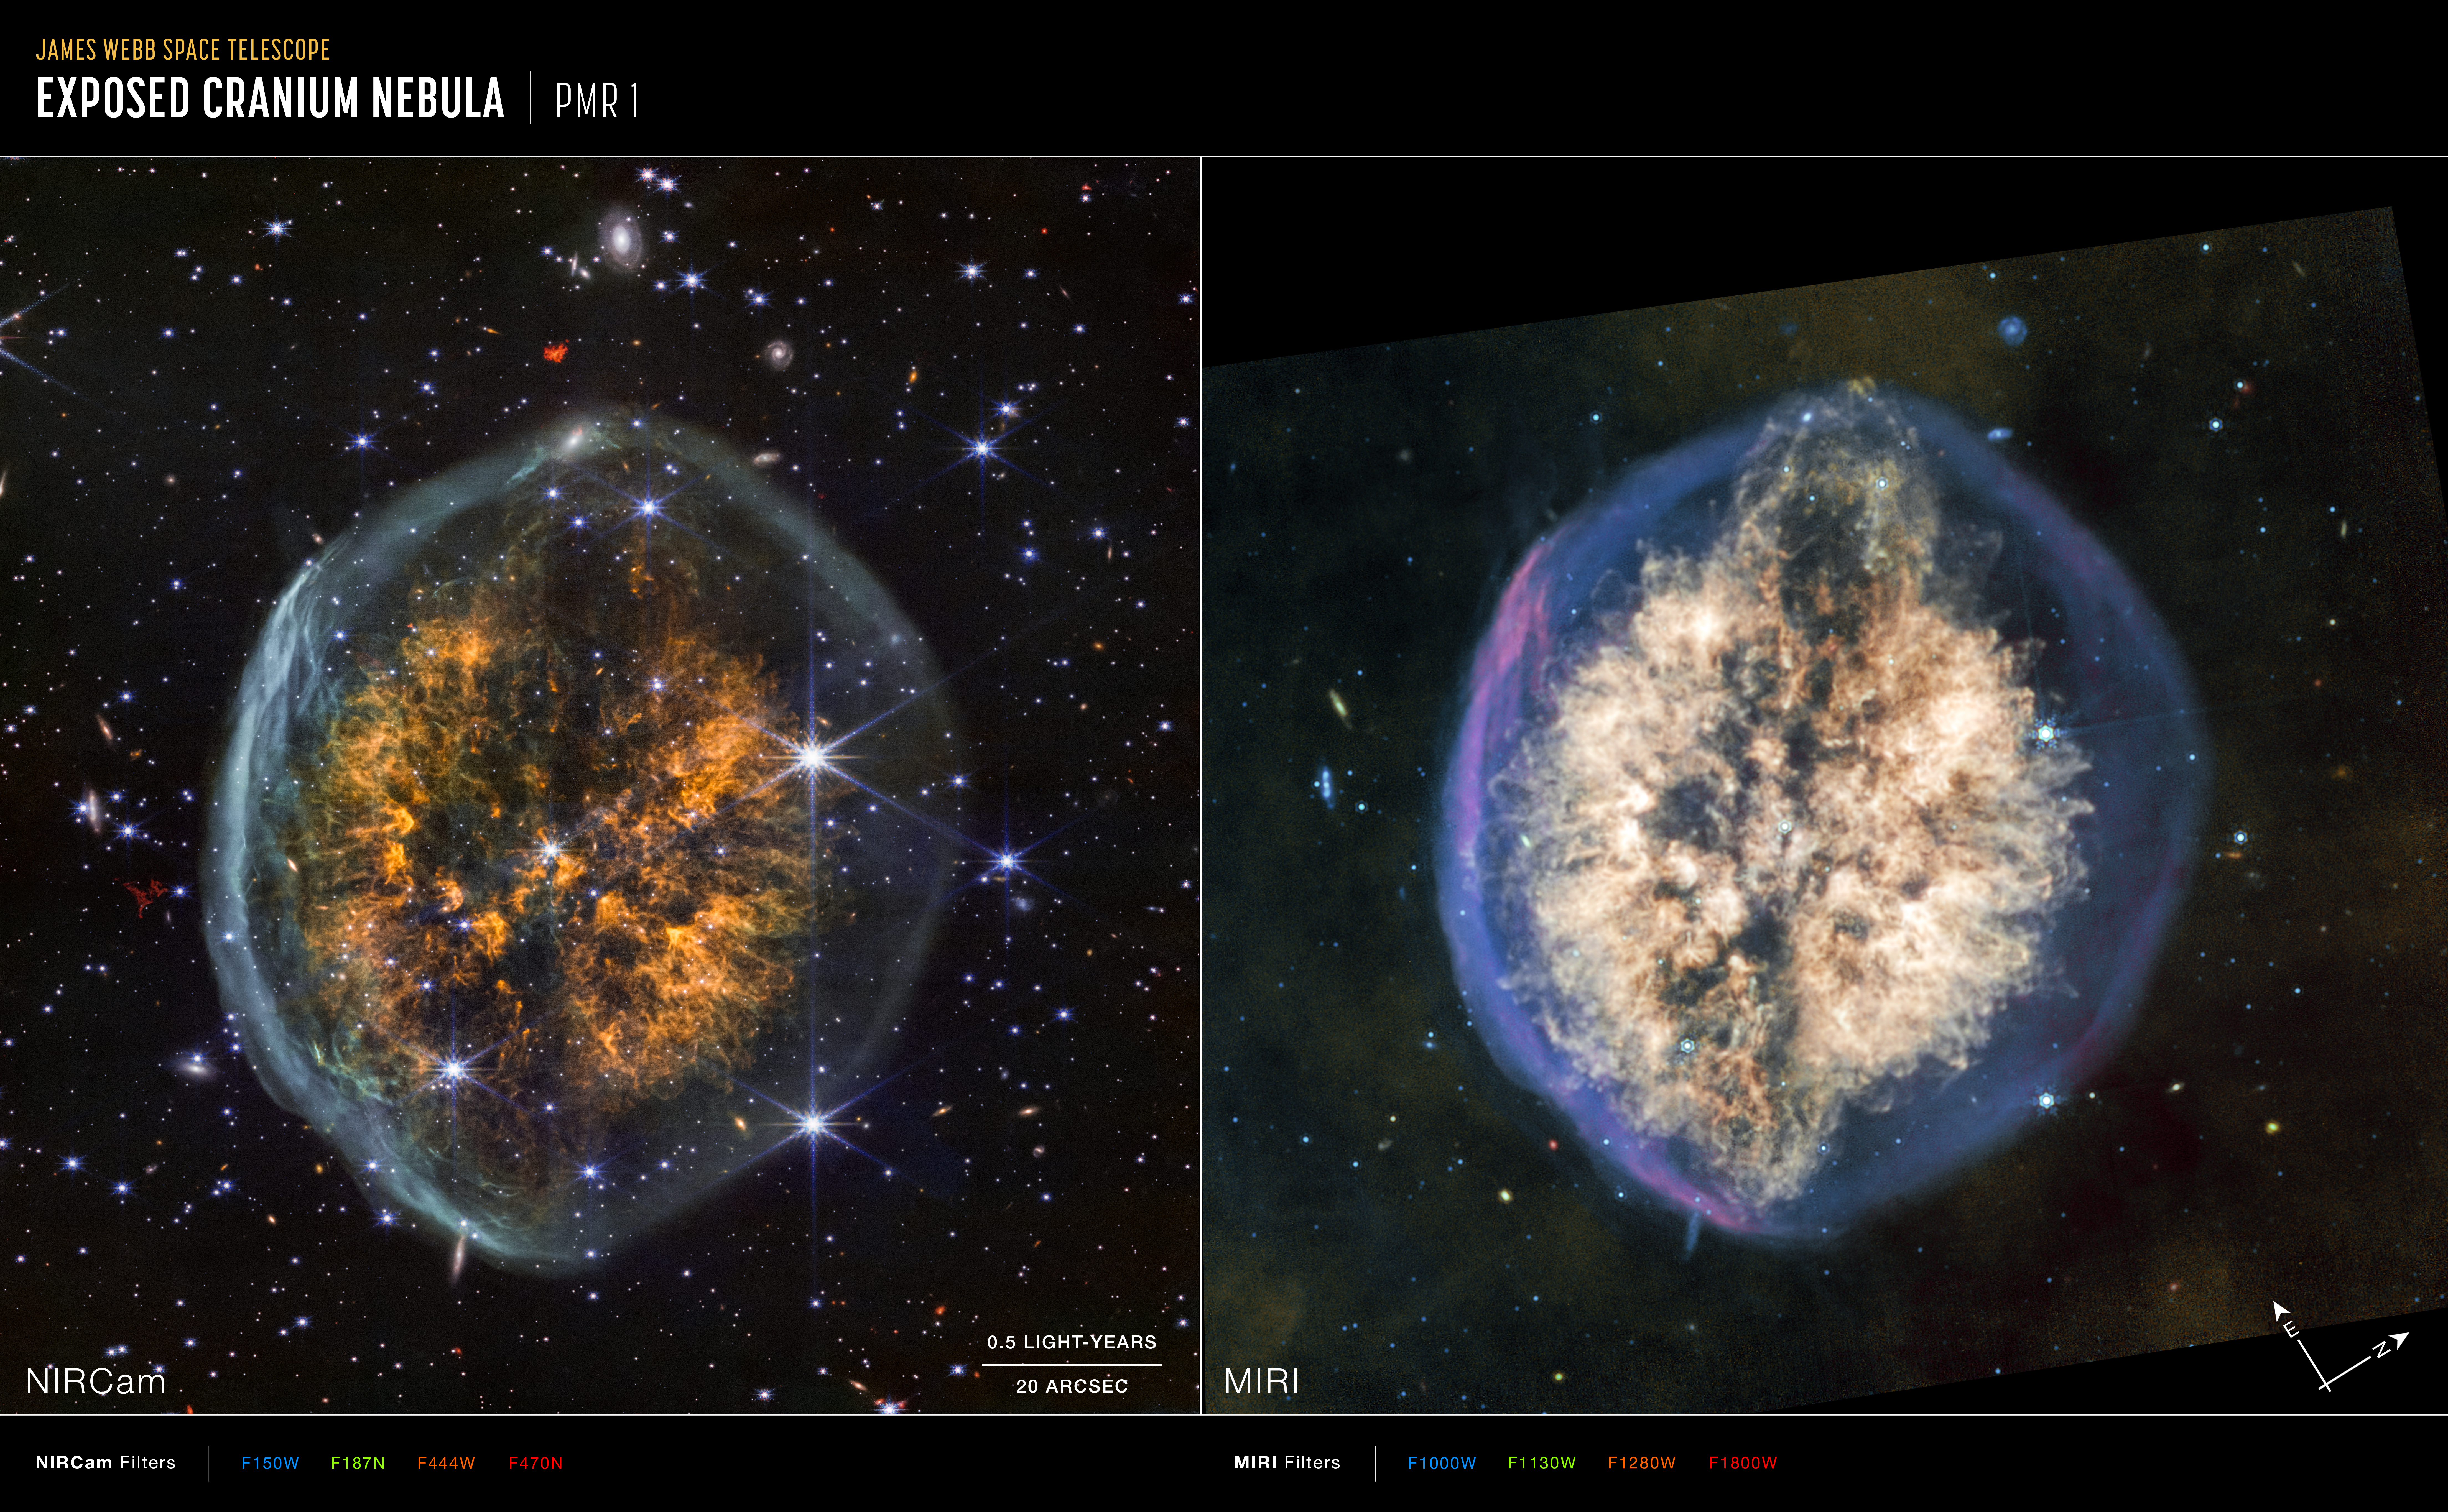

Exposed Cranium Nebula (NIRCam and MIRI annotated images)

These images of the “Exposed Cranium” nebula PMR 1, captured by the James Webb Space Telescope’s NIRCam (Near-Infrared Camera) and MIRI (Mid-Infrared Instrument) include compass arrows, scale bar, and colour key for reference. Note that the relationship between north and east on the sky (as seen from below) is flipped relative to direction arrows on a map of the ground (as seen from above).

The scale bar is labeled in light-years, which is the distance that light travels in one Earth-year (it takes 6 months for light to travel a distance equal to the length of the bar). One light-year is equal to about 9.46 trillion kilometres. The field of view shown in this image is approximately 3.5 light-years across.

These images show invisible near-infrared and mid-infrared wavelengths of light that have been translated into visible-light colours. The colour key shows which NIRCam and MIRI filters were used when collecting the light. The colour of each filter name is the visible light colour used to represent the infrared light that passes through that filter.

Credit: NASA, ESA, CSA, STScI, Image Processing: Joseph DePasquale (STScI)